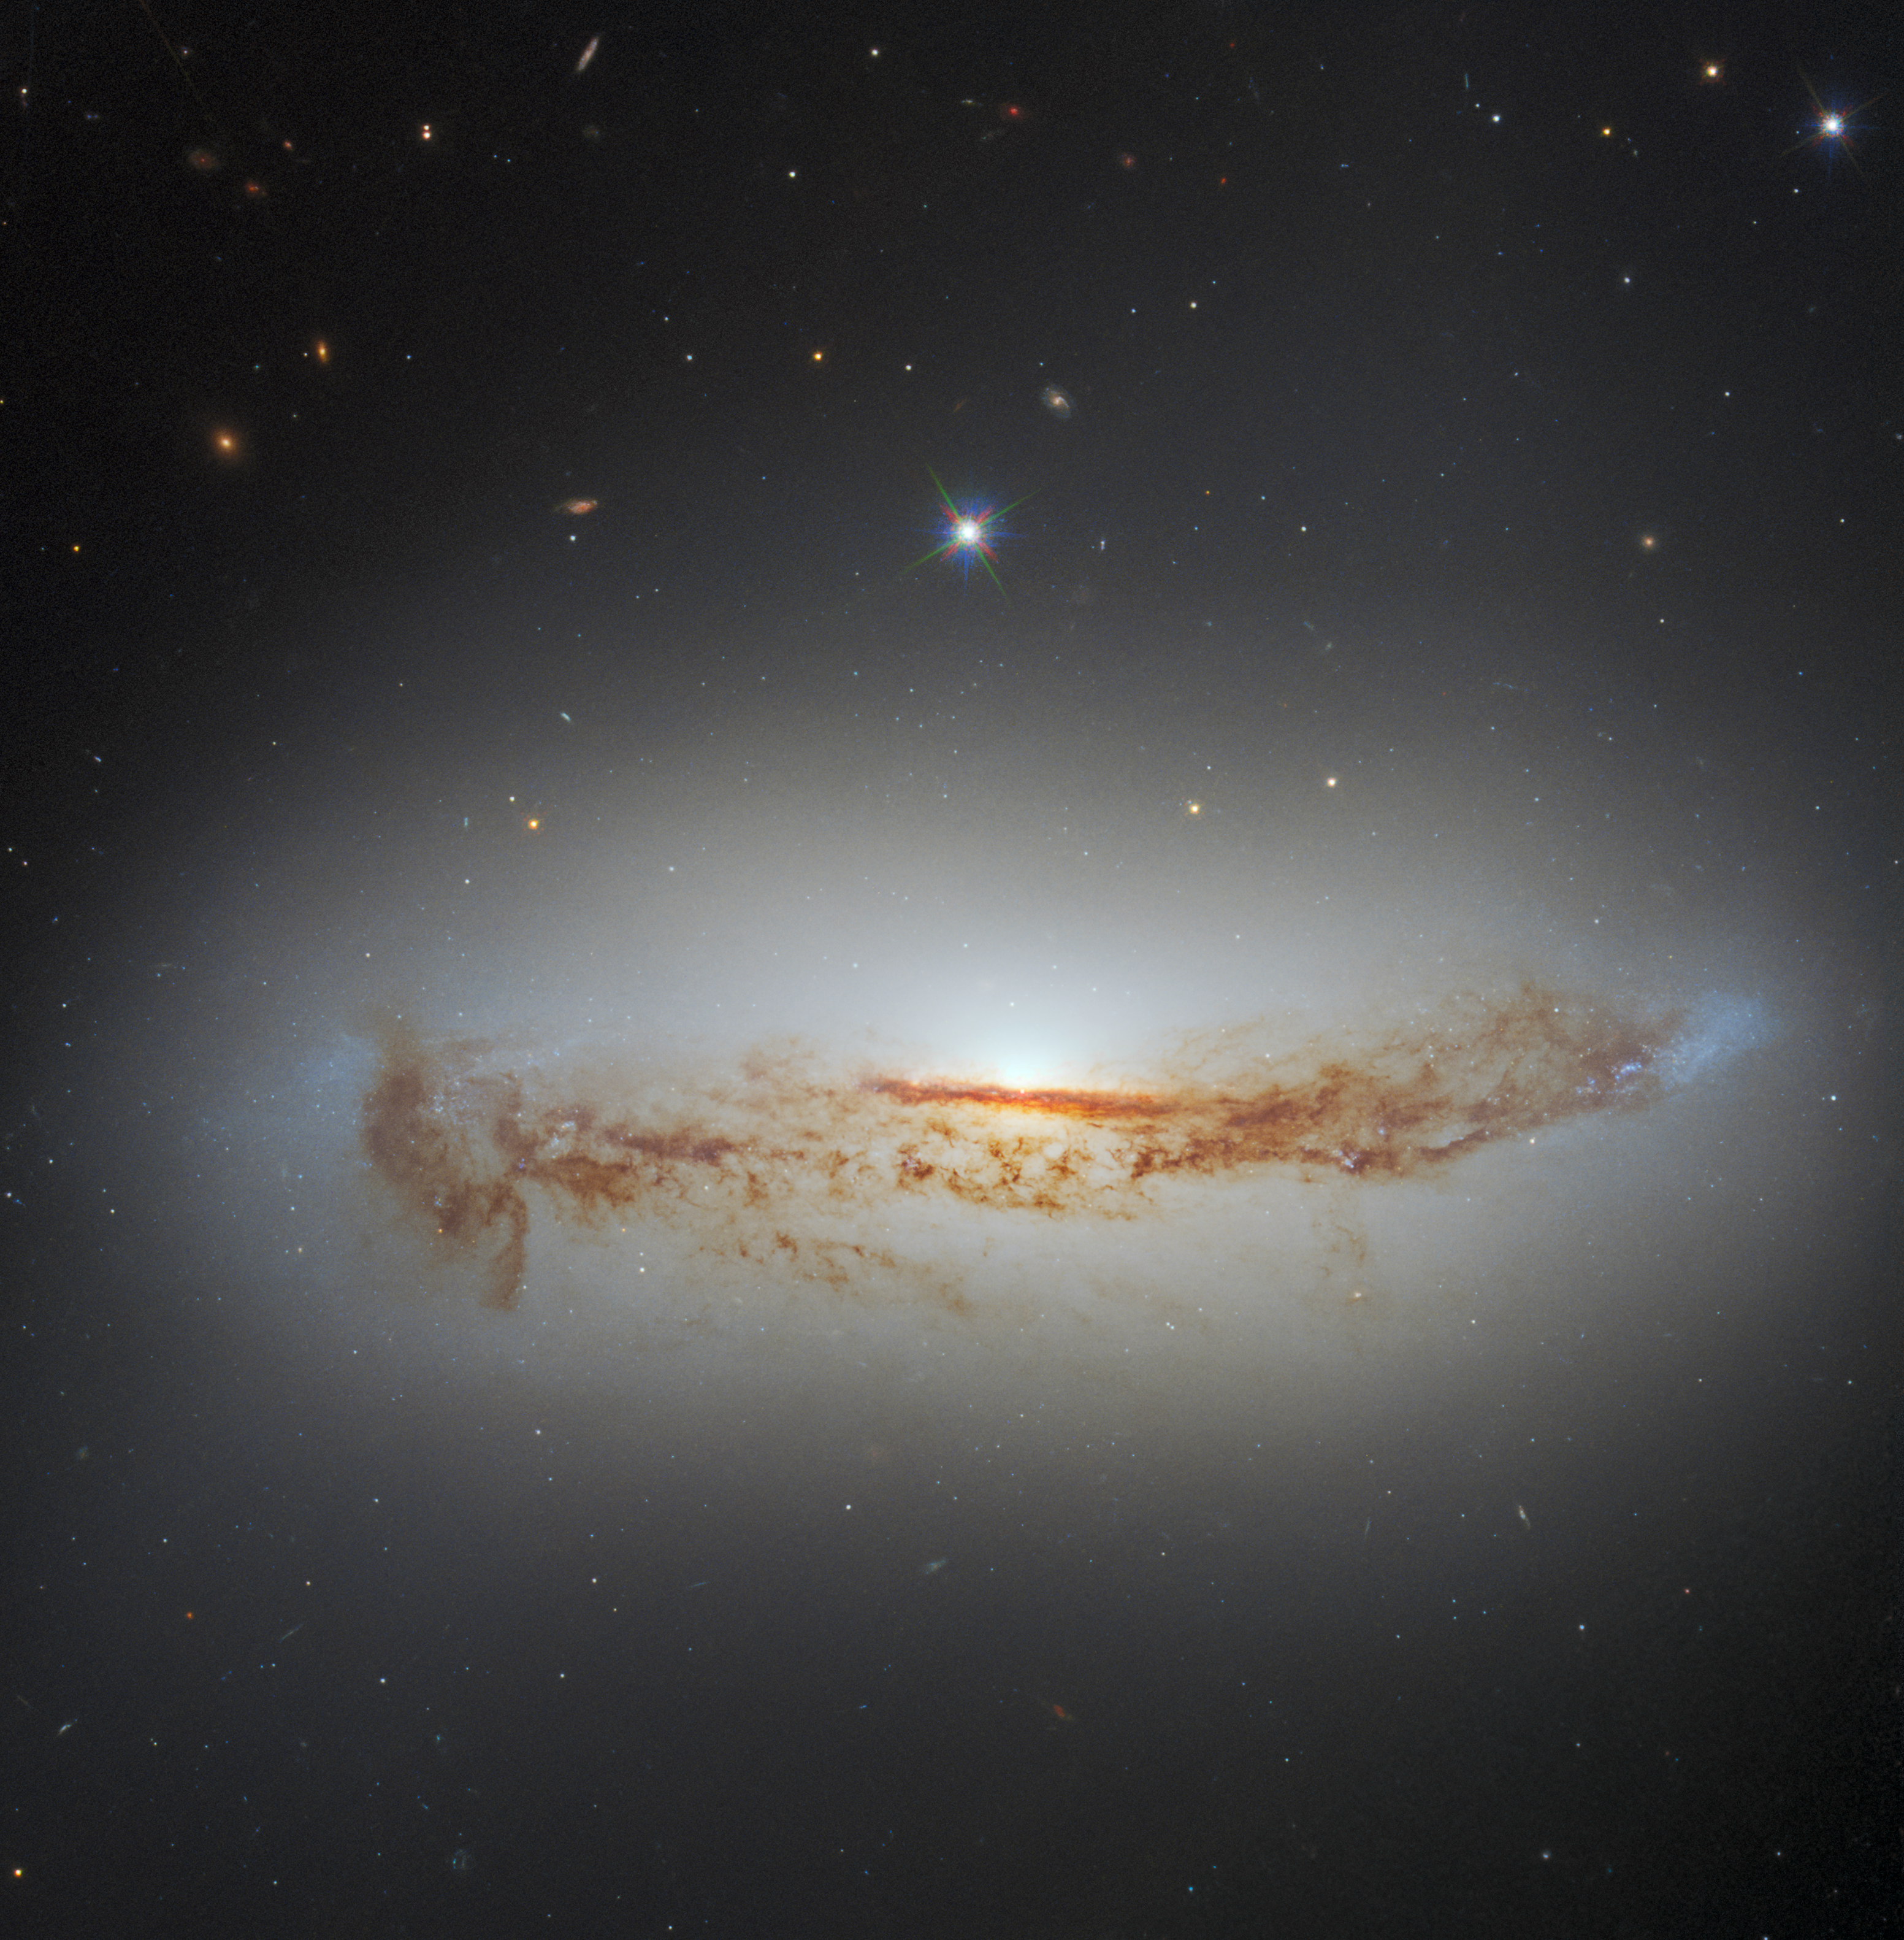

More Than Meets the Eye

Tendrils of dark dust can be seen threading across the heart of the spiral galaxy NGC 7172 in this image from the NASA/ESA Hubble Space Telescope. The galaxy lies approximately 110 million light-years from Earth in the constellation Piscis Austrinus. The lane of dust threading its way across NGC 7172 — which is viewed side-on in this image — is obscuring the luminous heart of the galaxy, making NGC 7172 appear to be nothing more than a normal edge-on spiral galaxy.

When astronomers inspected NGC 7172 across the electromagnetic spectrum they quickly discovered that there was more to it than meets the eye: NGC 7172 is a Seyfert galaxy — a type of galaxy with an intensely luminous active galactic nucleus powered by matter accreting onto a supermassive black hole.

This image combines data from two sets of Hubble observations, both of which were proposed to study nearby active galactic nuclei. The image also combines data from two instruments — Hubble’s Advanced Camera for Surveys (ACS) and Wide Field Camera 3 (WFCS).

Credit: ESA/Hubble & NASA, D. J. Rosario, A. Barth
Acknowledgement: L. Shatz